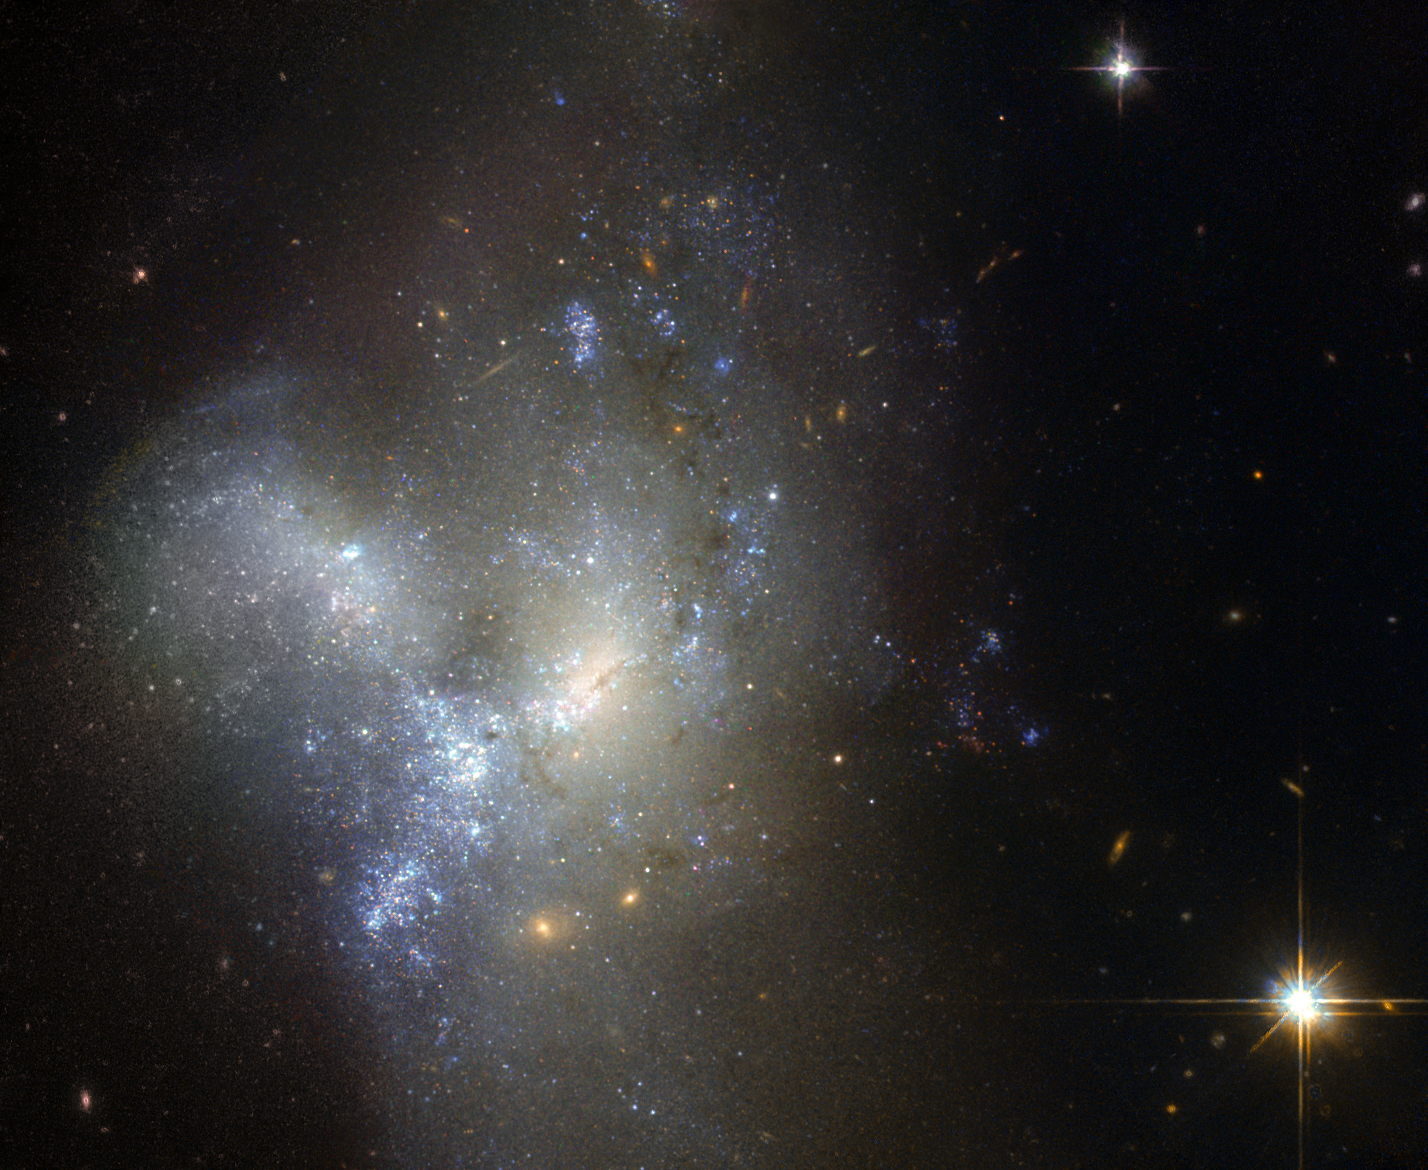

One from many

This image, taken by the NASA/ESA Hubble Space Telescope, shows a peculiar galaxy known as NGC 1487, lying about 30 million light-years away in the southern constellation of Eridanus.

Rather than viewing a celestial object, it is actually better to think of this as an event. Here, we are witnessing two or more galaxies in the act of merging together to form a single new galaxy. Each progenitor has lost almost all traces of its original appearance, as stars and gas have been thrown hither and thither by gravity in an elaborate cosmic whirl.

Unless one is very much bigger than the other, galaxies are always disrupted by the violence of the merging process. As a result, it is very difficult to determine precisely what the original galaxies looked like and, indeed, how many of them there were. In this case, it is possible that we are seeing the merger of several dwarf galaxies that were previously clumped together in a small group.

Although older yellow and red stars can be seen in the outer regions of the new galaxy, its appearance is dominated by large areas of bright blue stars, illuminating the patches of gas that gave them life. This burst of star formation may well have been triggered by the merger.

Credit: ESA/Hubble & NASA Acknowledgement: Judy Schmidt (Geckzilla)